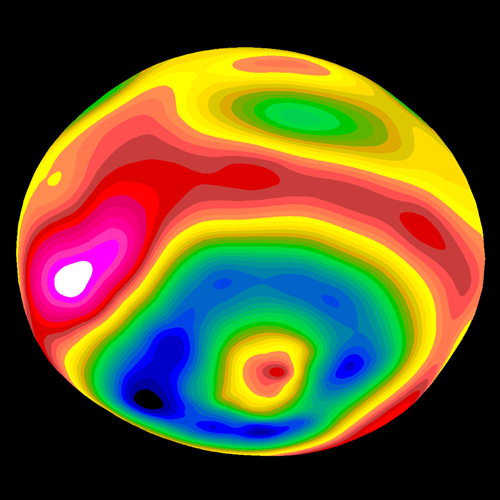

Crater on Asteroid Vesta

A color-encoded elevation map of Vesta clearly shows the giant 285- mile diameter impact basin and 'bull's-eye' central peak. The map was constructed from 78 Wide Field Planetary Camera 2 pictures. Surface topography was estimated by noting irregularities along the limb and at the terminator (day/night boundary) where shadows are enhanced by the low Sun angle.

Credit: Ben Zellner (Georgia Southern University), Peter Thomas (Cornell University), NASA/ESA